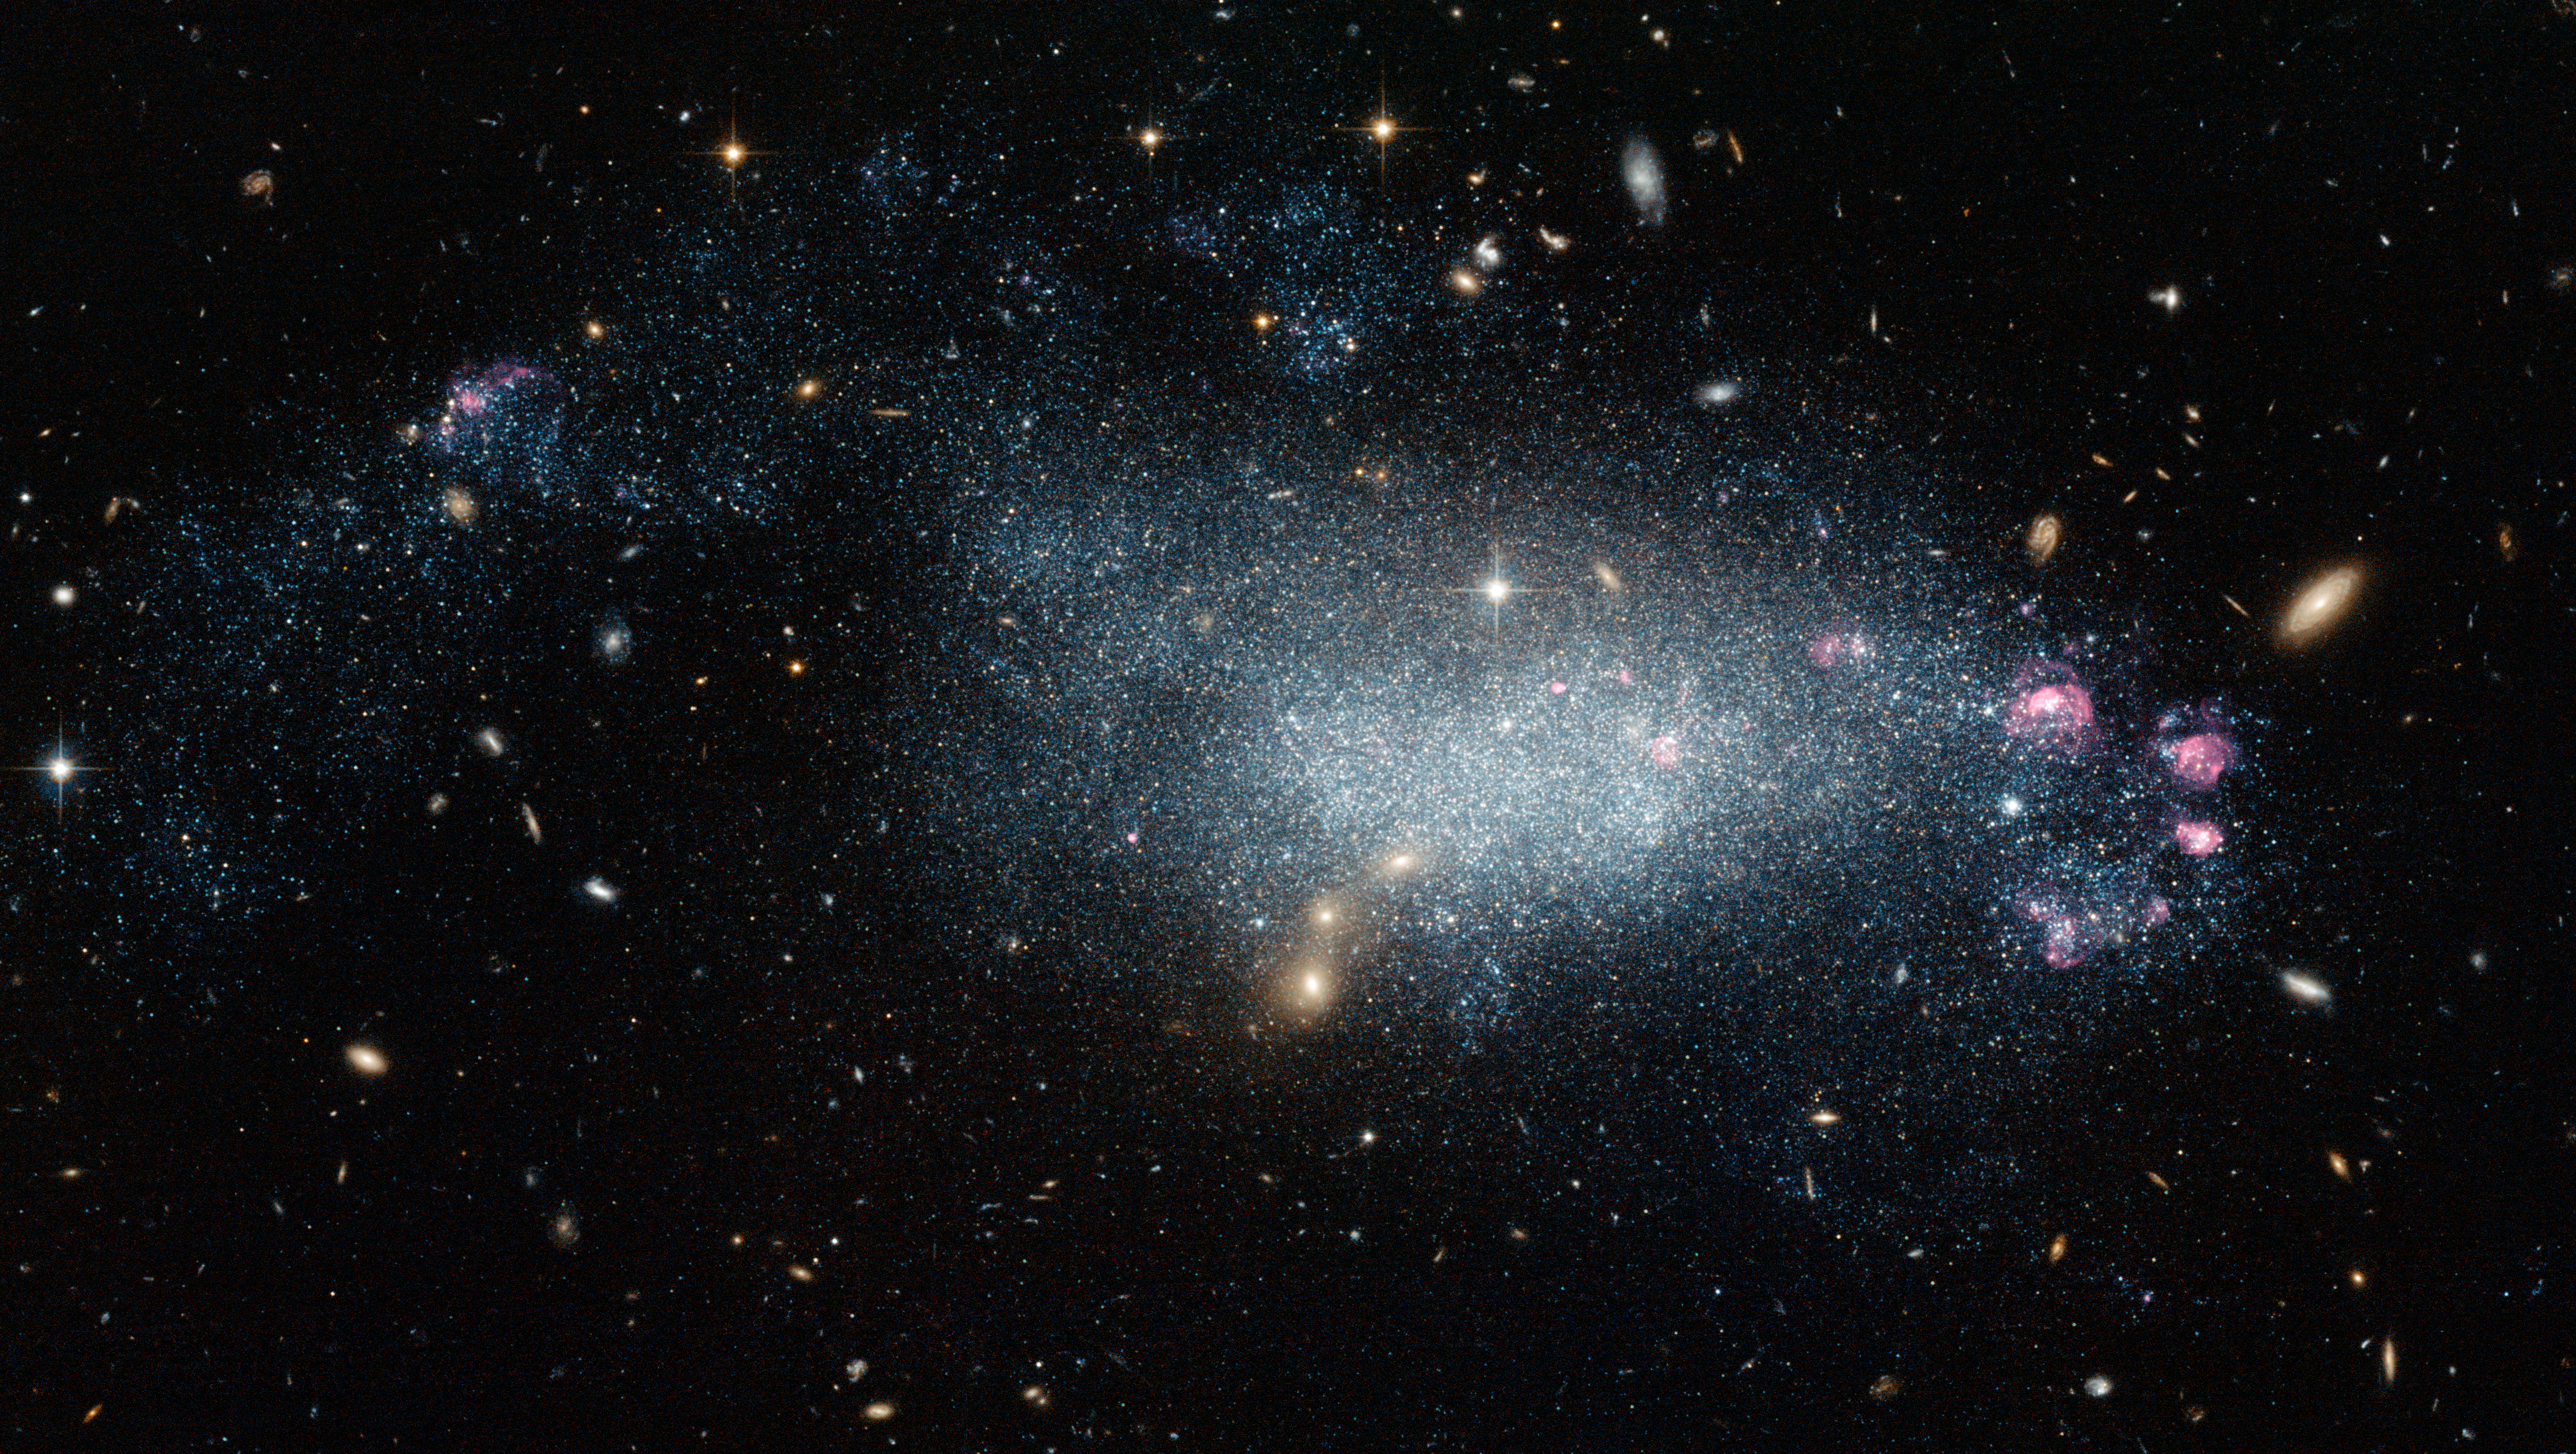

Dwarf galaxy DDO 68

This image from the NASA/ESA Hubble Space Telescope shows a cosmic oddity, dwarf galaxy DDO 68.

This ragged collection of stars and gas clouds looks at first glance like a recently-formed galaxy in our own cosmic neighbourhood. But, is it really as young as it looks?

Credit: NASA, ESA
Acknowledgement: A. Aloisi (Space Telescope Science Institute)